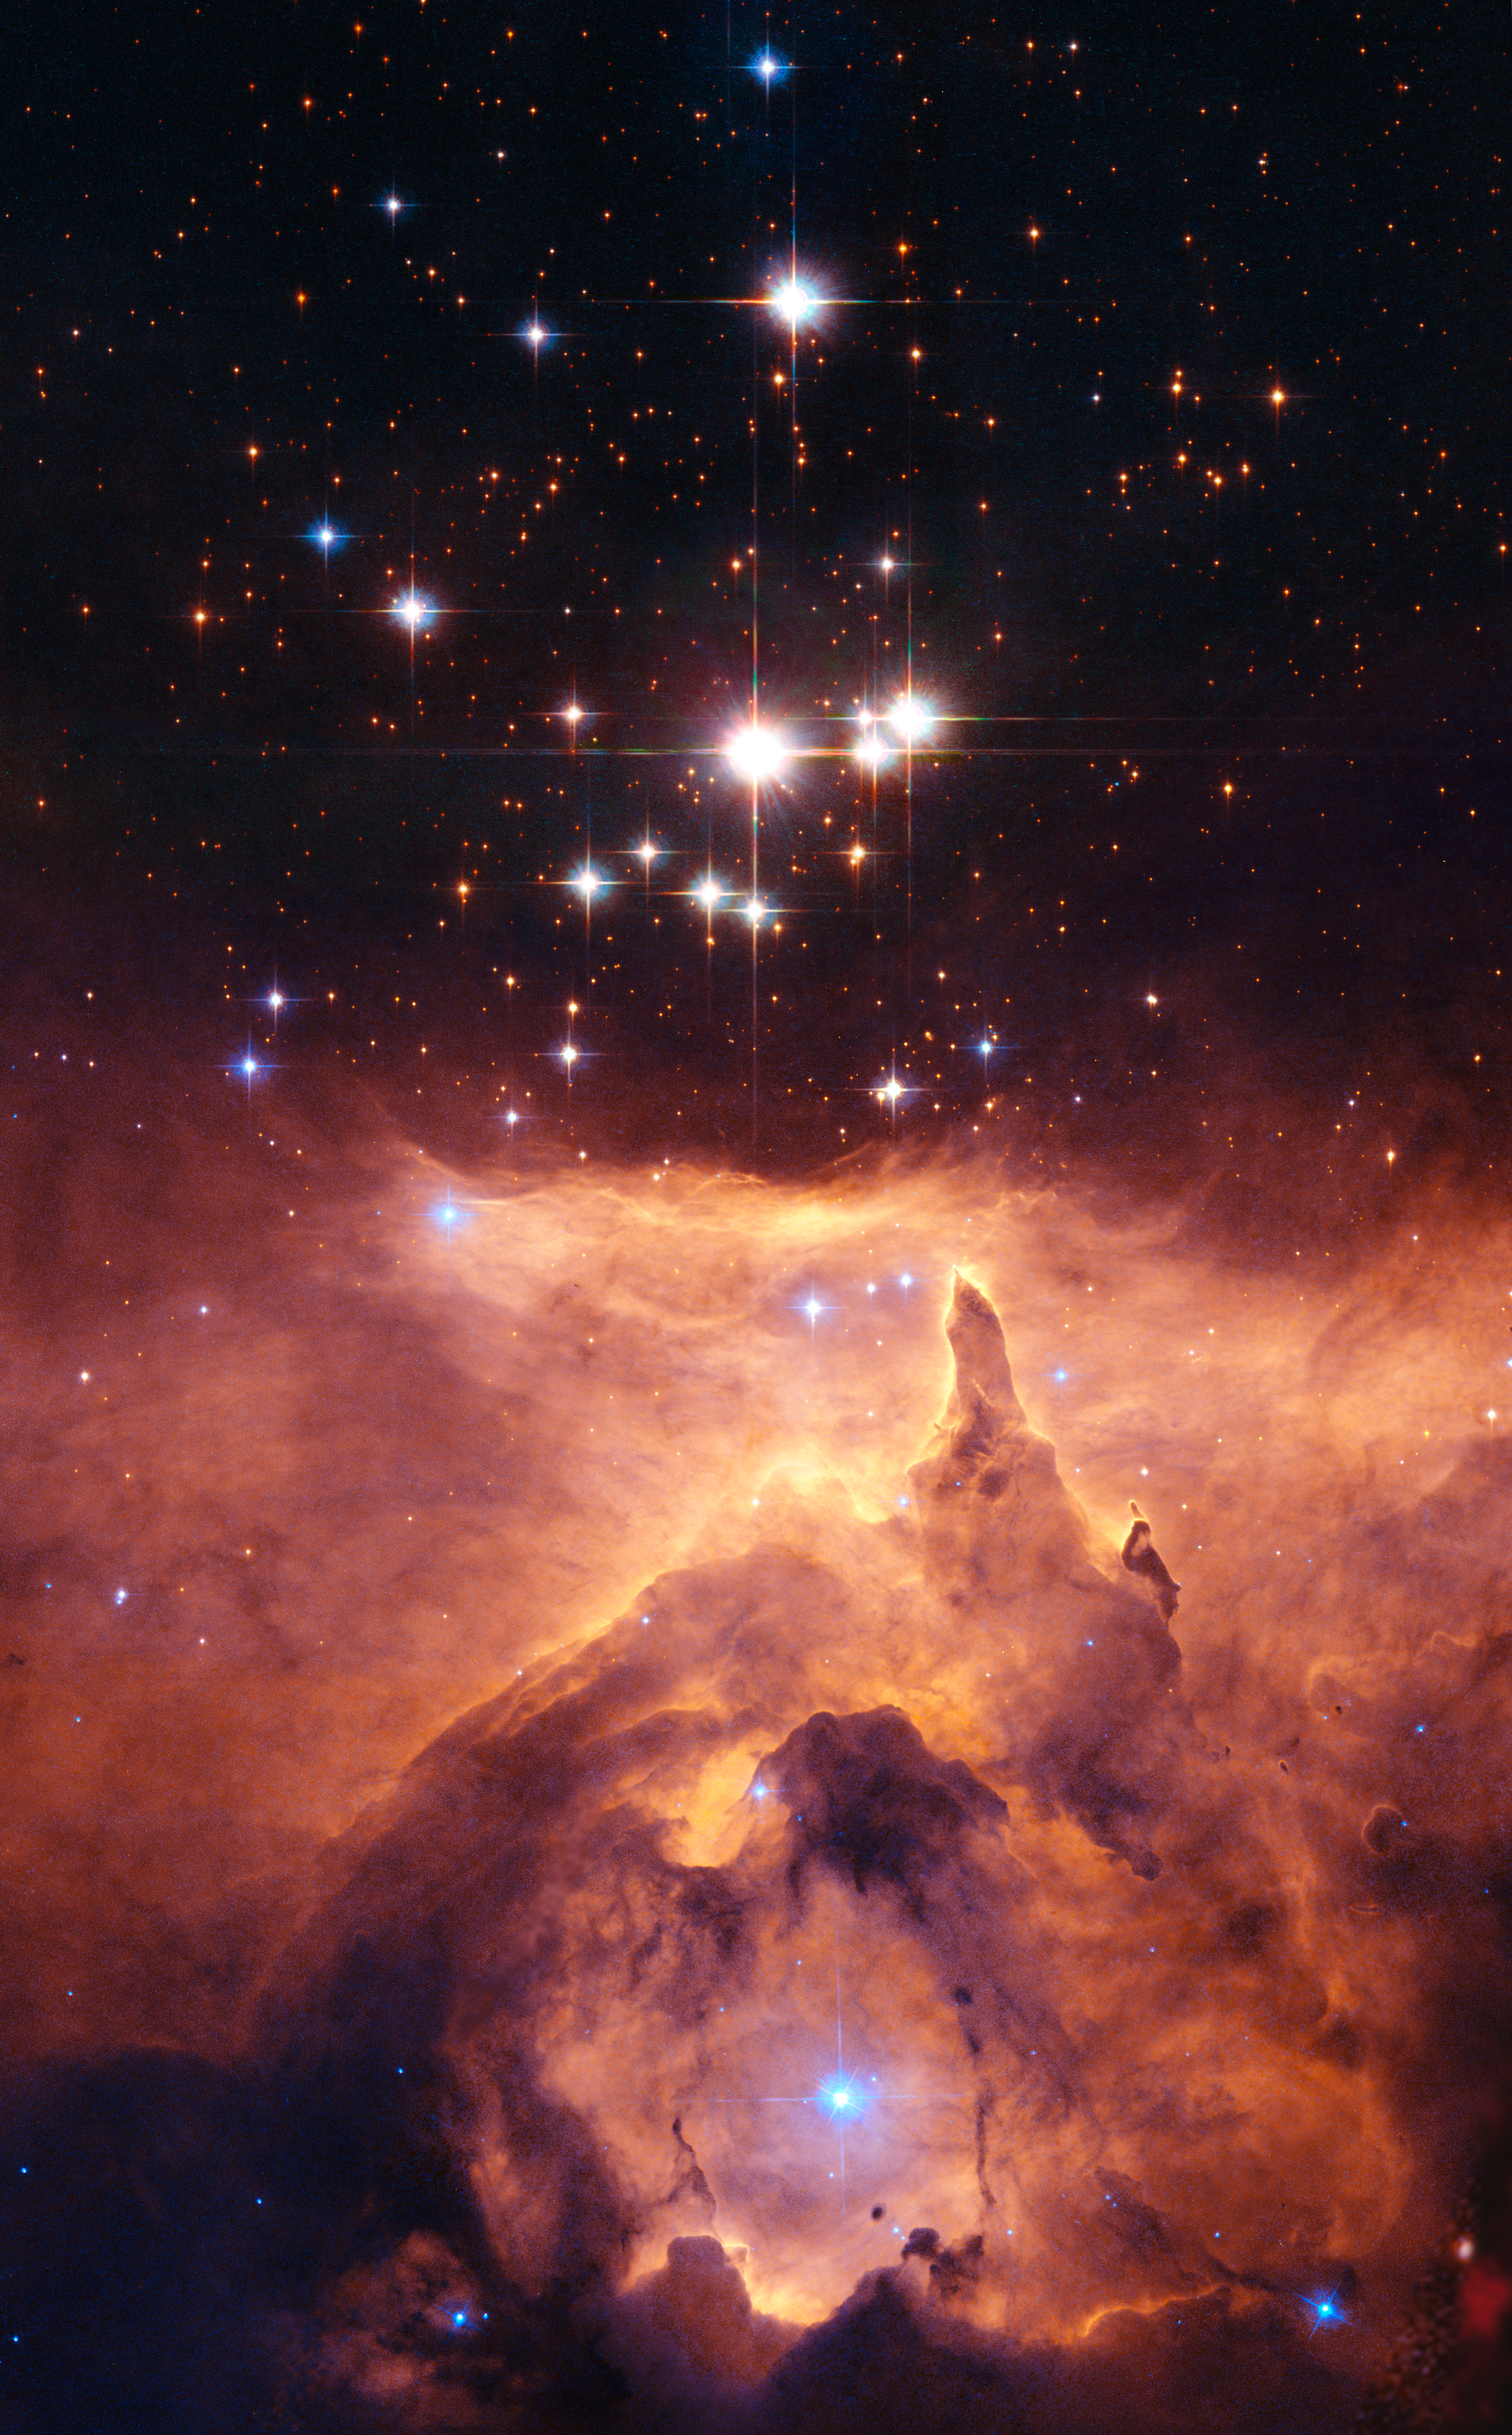

Star on a Hubble diet

The star cluster Pismis 24 lies in the core of the large emission nebula NGC 6357 that extends one degree on the sky in the direction of the Scorpius constellation. Part of the nebula is ionised by the youngest (bluest) heavy stars in Pismis 24. The intense ultraviolet radiation from the blazing stars heats the gas surrounding the cluster and creates a bubble in NGC 6357. The presence of these surrounding gas clouds makes probing into the region even harder.

One of the top candidates for the title of "Milky Way stellar heavyweight champion" was, until now, Pismis 24-1, a bright young star that lies in the core of the small open star cluster Pismis 24 (the bright stars in the Hubble image) about 8,000 light-years away from Earth. Pismis 24-1 was thought to have an incredibly large mass of 200 to 300 solar masses. New NASA/ESA Hubble measurements of the star, have, however, resolved Pismis 24-1 into two separate stars, and, in doing so, have "halved" its mass to around 100 solar masses.

Credit: NASA, ESA and Jesús Maíz Apellániz (Instituto de Astrofísica de Andalucía, Spain). Acknowledgement: Davide De Martin (ESA/Hubble)